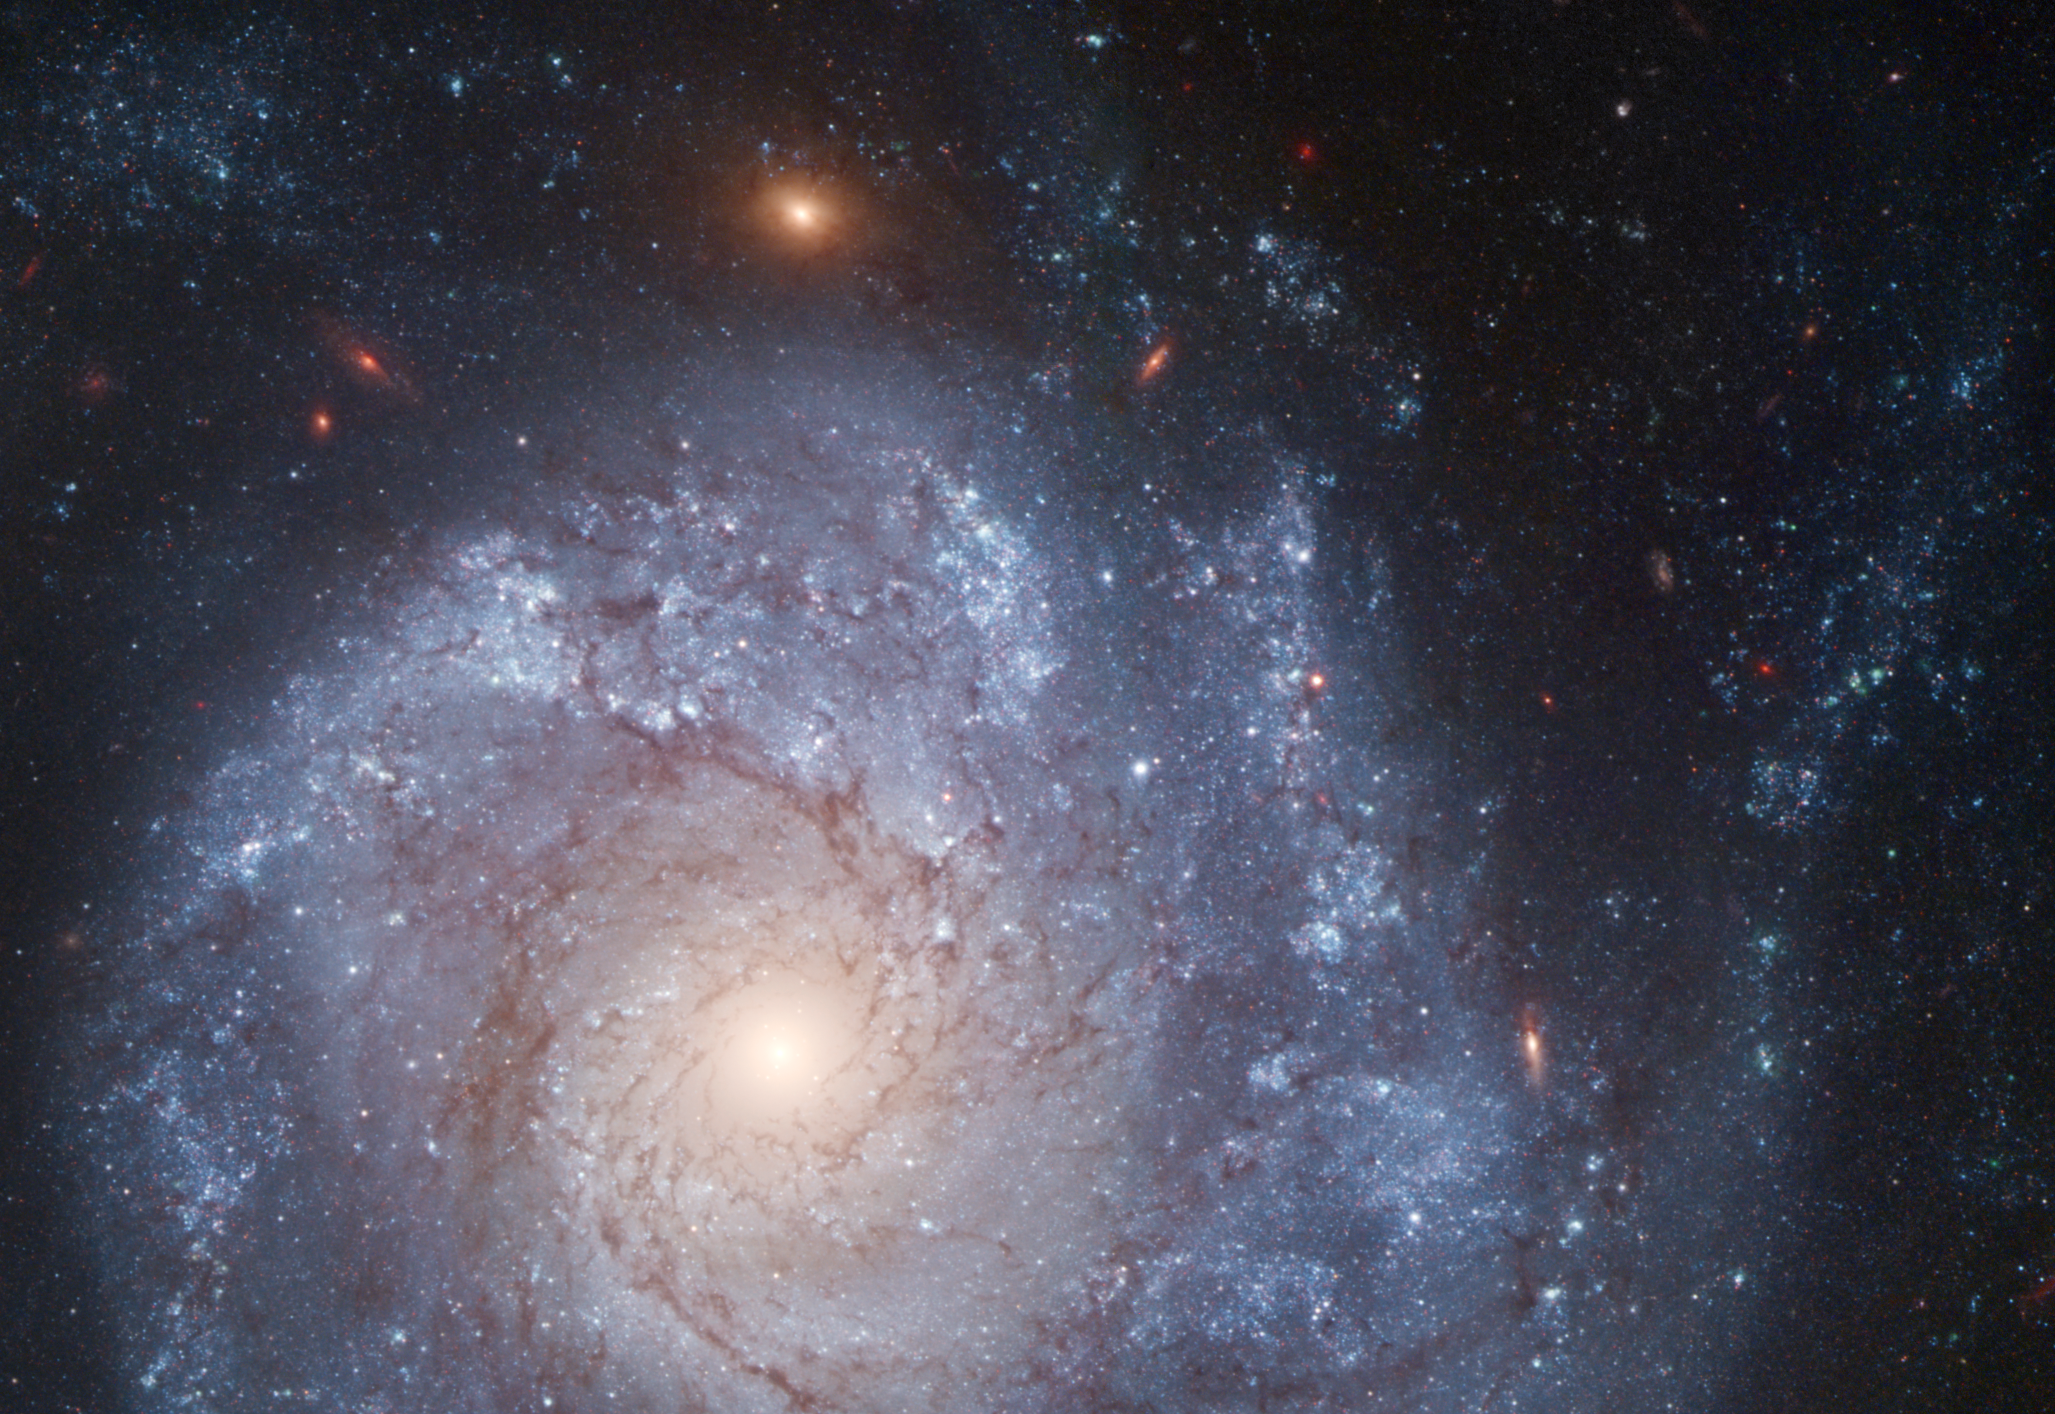

Spiral galaxy NGC 1309

This image shows spiral galaxy NGC 1309. Astronomers have observed a rare type Iax supernova in the outskirts of the galaxy. The stellar explosion, known as Supernova 2012Z, s highlighted in the annotated version of this image.

Credit: NASA, ESA, The Hubble Heritage Team (STScI/AURA), and A. Riess (JHU/STScI)